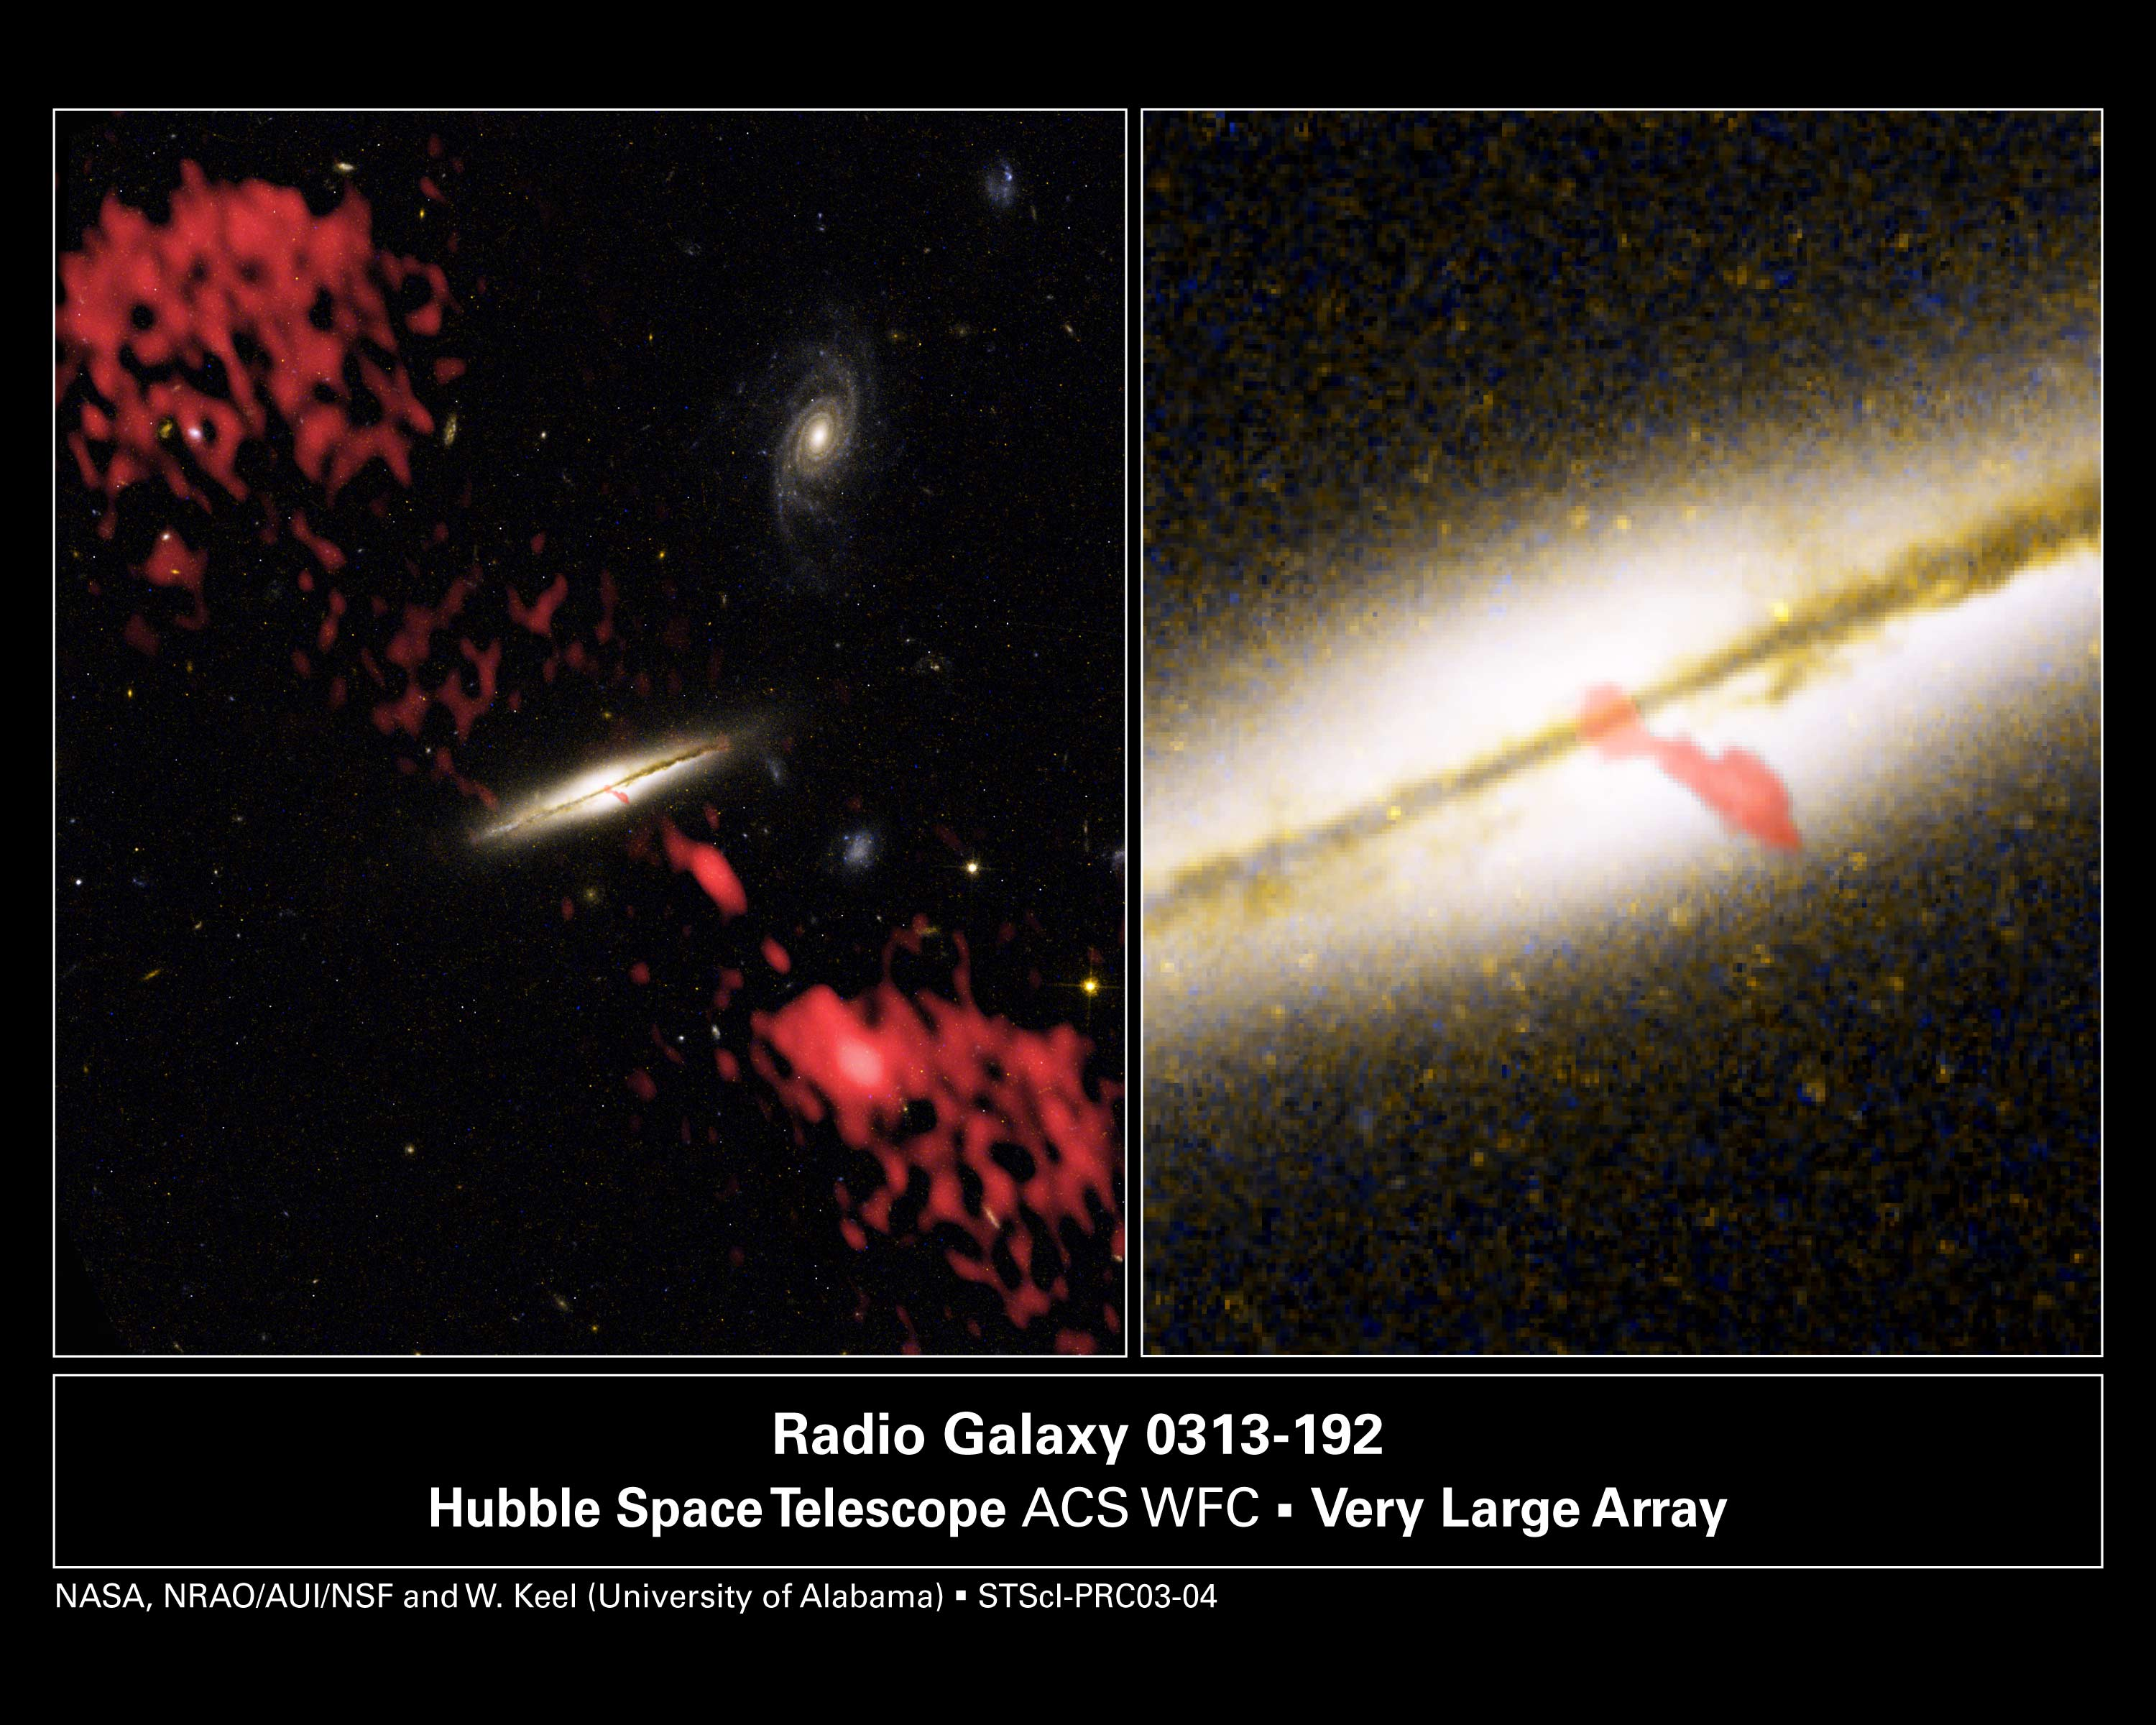

Giant Radio Jet Coming from Wrong Kind of Galaxy

These are composite images of the galaxy 0313-192, the first spiral galaxy known to be producing a giant radio-emitting jet.

The image at left represents two views of the galaxy that astronomers have combined into one photograph. The view of the galaxy and its surrounding environment was taken by the Hubble Space Telescope's Advanced Camera for Surveys. The red material in the image represents the radio-emitting jet, which was taken by the Very Large Array. The galaxy is seen edge-on.

At right is a close-up of the Hubble telescope image. Another red overlay from a higher-resolution Very Large Array picture shows the inner portion of the jet.

Credit: NASA/ESA, W. Keel (University of Alabama), M. Ledlow (Gemini Observatory), F. Owen (NRAO) and AUI/NSF